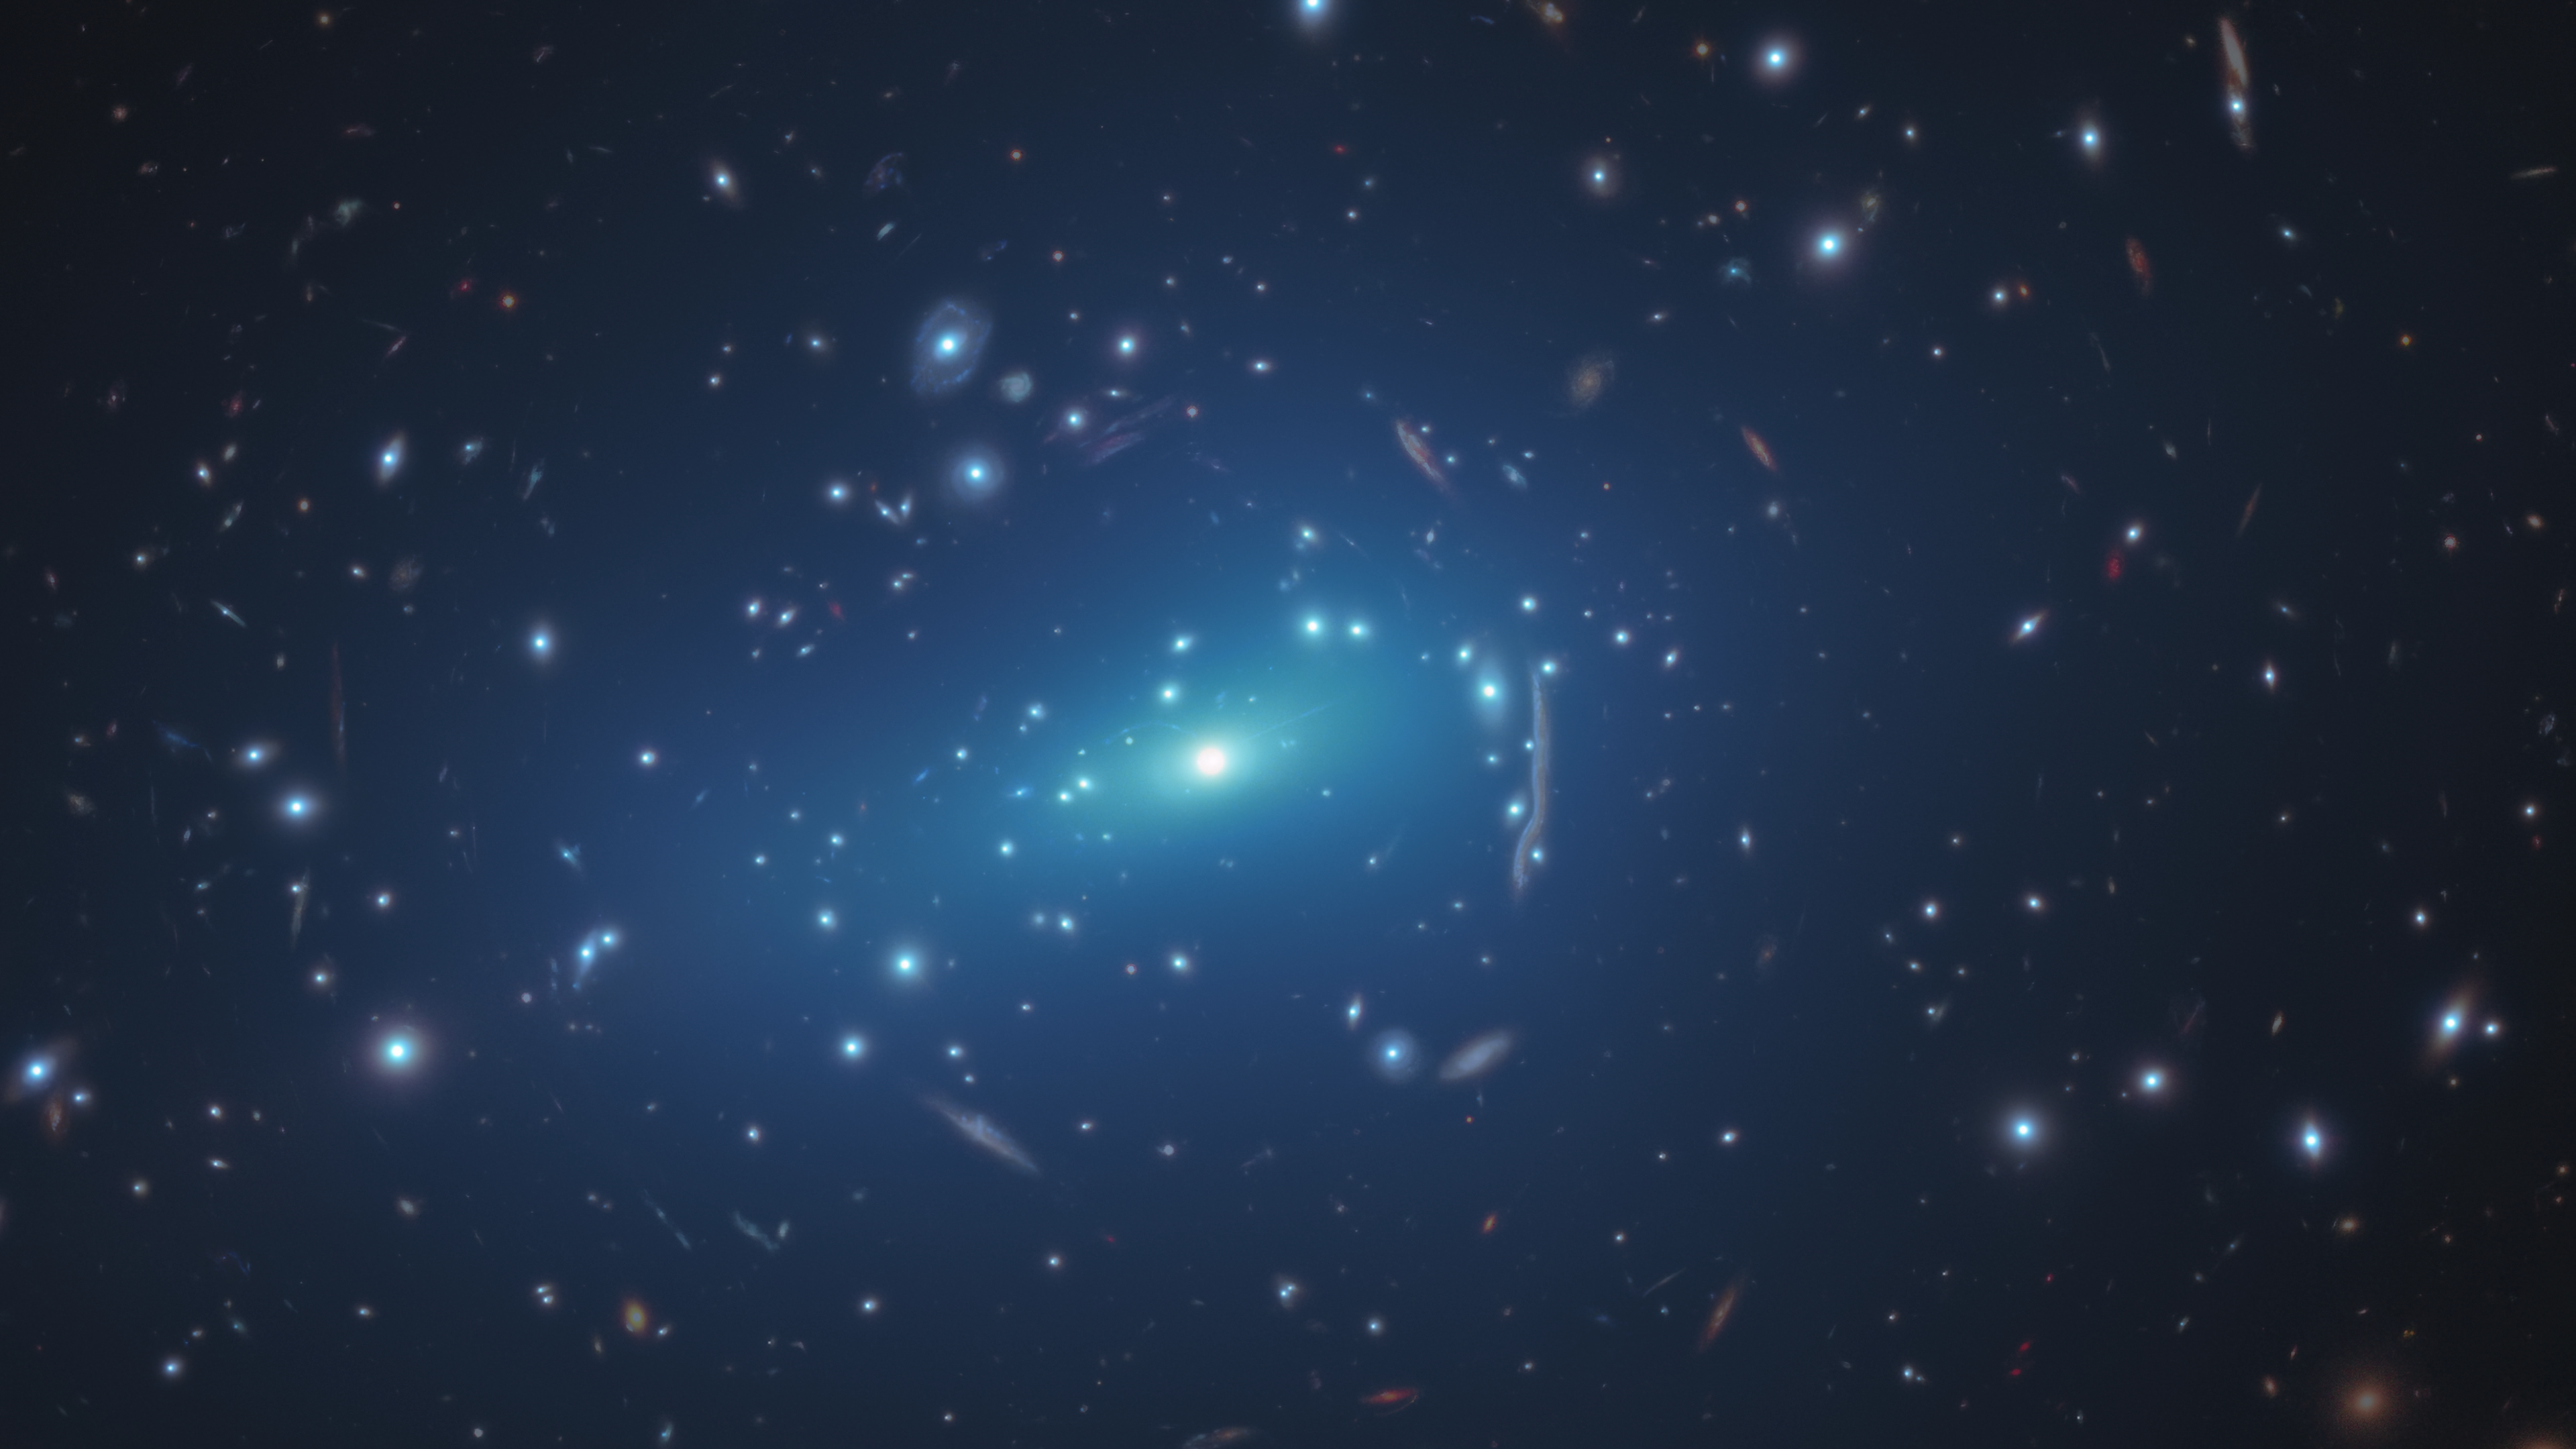

Hubble Sheds Light on Small-Scale Concentrations of Dark Matter (Artist’s Impression)

This NASA/ESA Hubble Space Telescope image shows the massive galaxy cluster MACSJ 1206. Embedded within the cluster are the distorted images of distant background galaxies, seen as arcs and smeared features. These distortions are caused by the dark matter in the cluster, whose gravity bends and magnifies the light from faraway galaxies, an effect called gravitational lensing. This phenomenon allows astronomers to study remote galaxies that would otherwise be too faint to see.

Overlaid on the image are small-scale concentrations of dark matter (represented in this artist’s impression in blue). Dark matter is the invisible glue that keeps stars bound together inside a galaxy and makes up the bulk of the matter in the Universe. These blue halos reflect how the galaxy cluster’s dark matter is distributed, revealed by new results from the Hubble Space Telescope. This was accomplished by a team of astronomers by measuring the amount of gravitational lensing.

Credit: NASA, ESA, G. Caminha (University of Groningen), M. Meneghetti (Observatory of Astrophysics and Space Science of Bologna), P. Natarajan (Yale University), the CLASH team, and M. Kornmesser (ESA/Hubble)